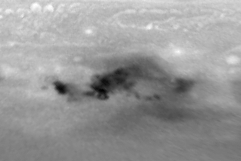

Evolution of D/G Impact Sites on Jupiter

This second image, obtained on 23 July, shows that the Jovian winds have swept the material into a striking 'curly-cue' structure.

Credit: H. Hammel, MIT and NASA/ESA